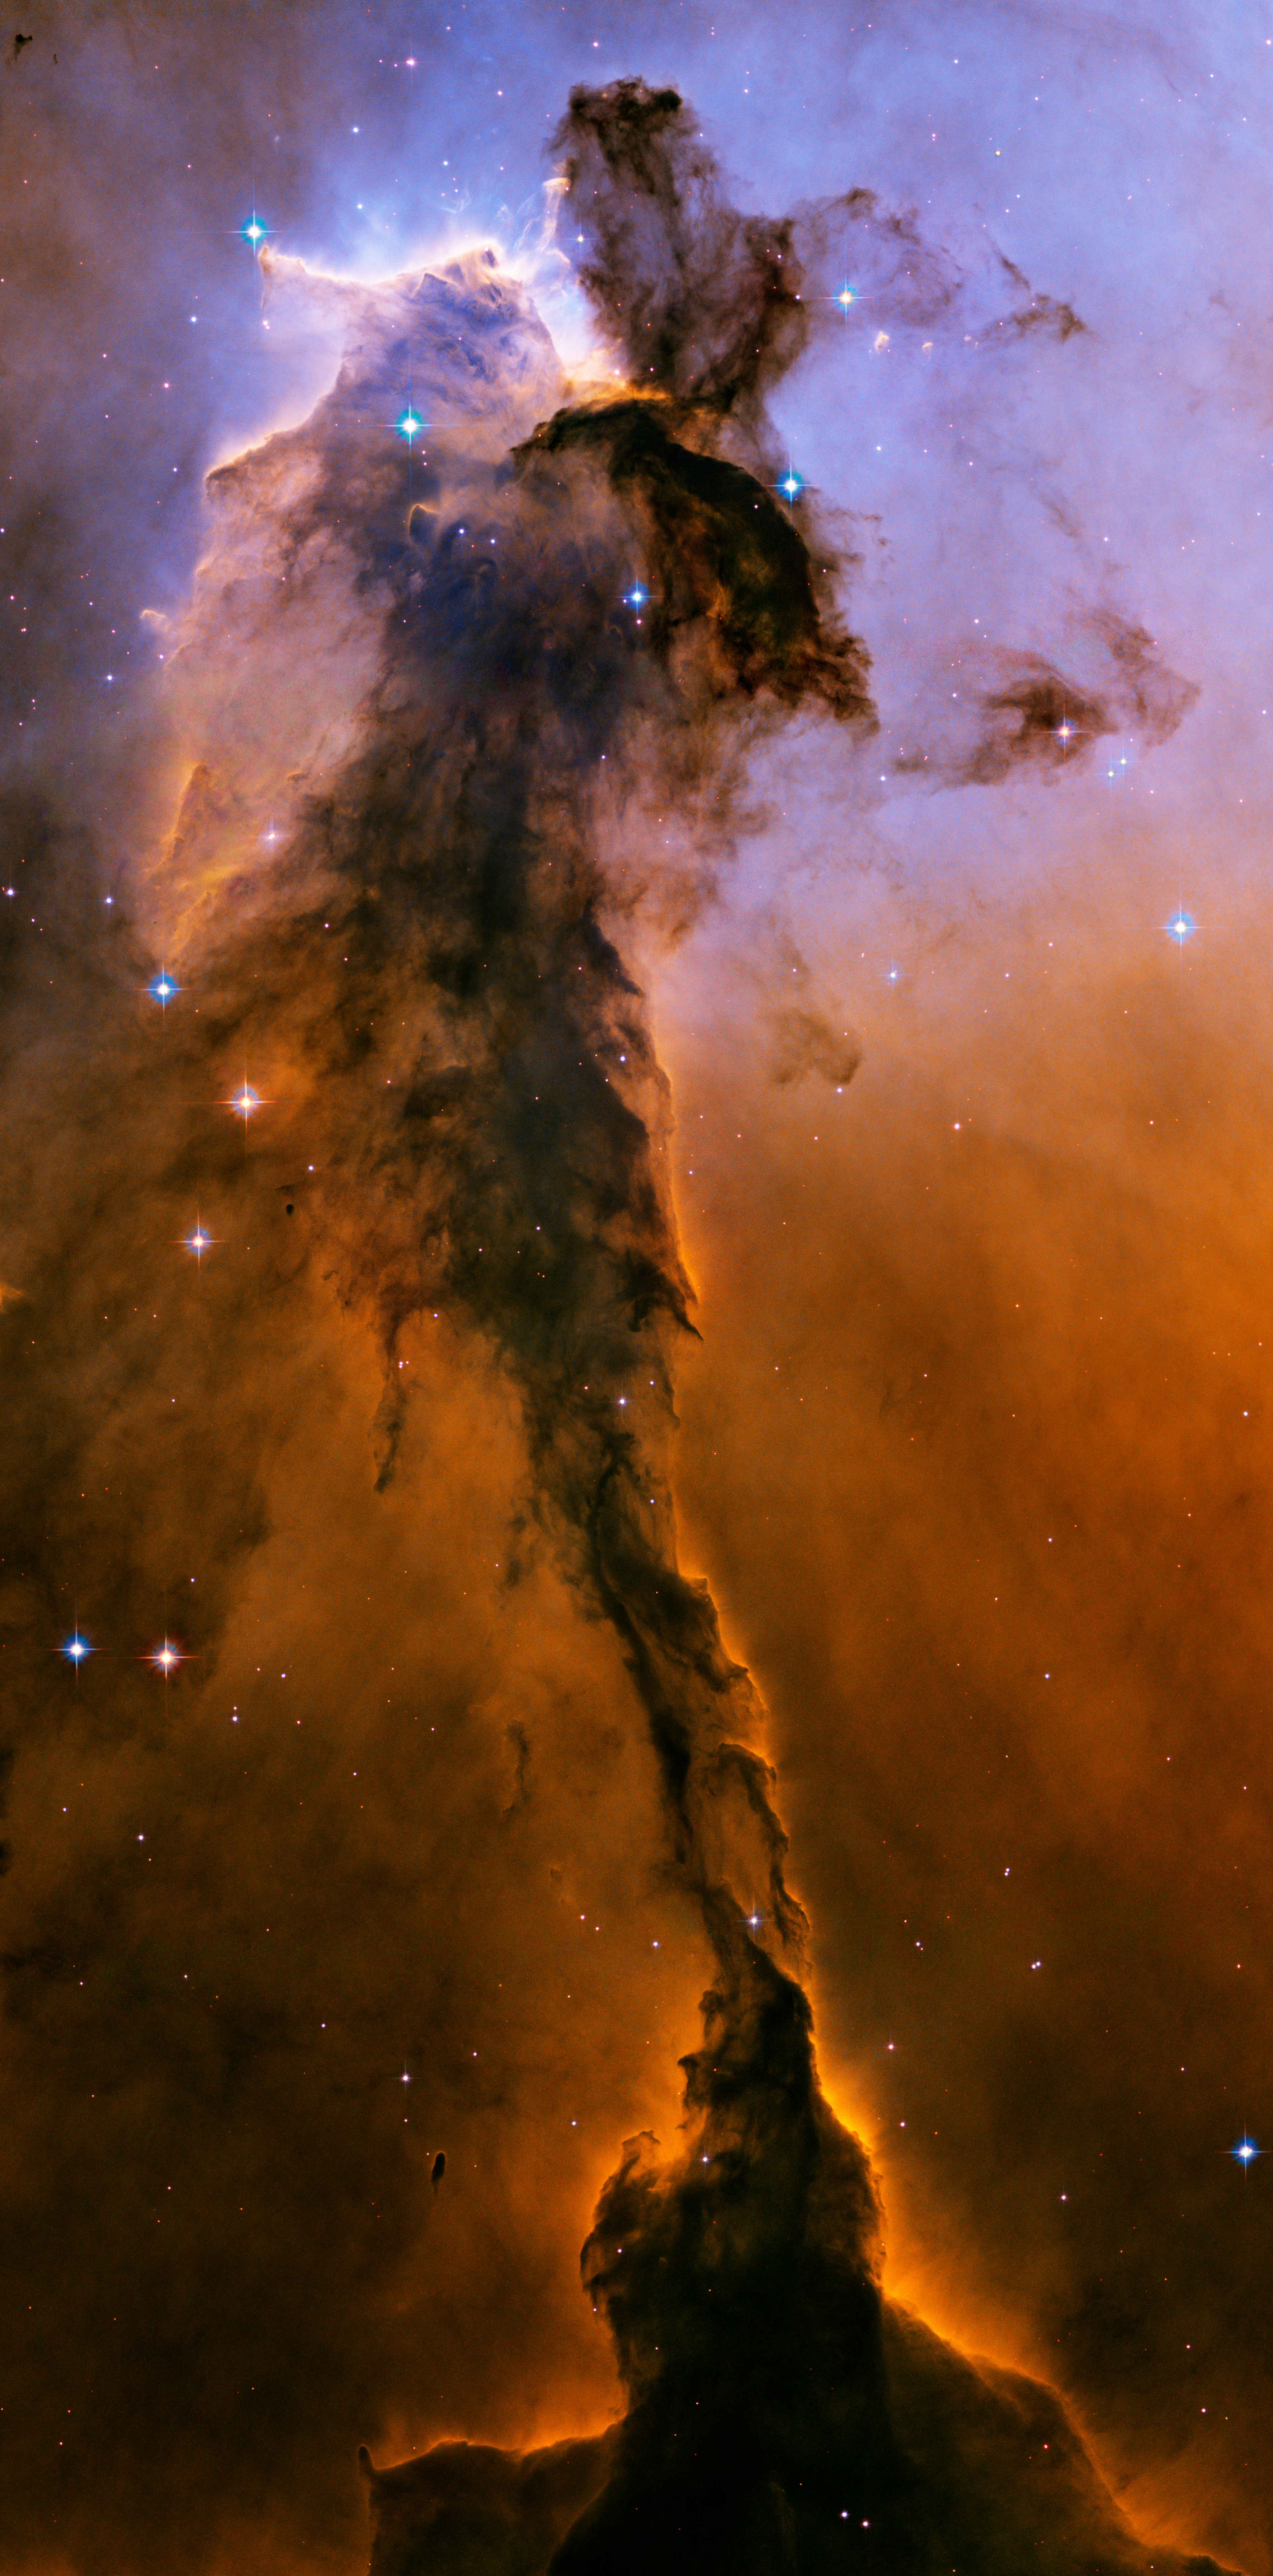

The Eagle has risen: stellar spire in the Eagle Nebula

Appearing like a winged fairy-tale creature poised on a pedestal, this object is actually a billowing tower of cold gas and dust rising from a stellar nursery called the Eagle Nebula. The soaring tower is 9.5 light-years or about 90 trillion kilometres high, about twice the distance from our Sun to the next nearest star.

Stars in the Eagle Nebula are born in clouds of cold hydrogen gas that reside in chaotic neighbourhoods, where energy from young stars sculpts fantasy-like landscapes in the gas. The tower may be a giant incubator for those newborn stars. A torrent of ultraviolet light from a band of massive, hot, young stars [off the top of the image] is eroding the pillar.

The starlight also is responsible for illuminating the tower's rough surface. Ghostly streamers of gas can be seen boiling off this surface, creating the haze around the structure and highlighting its three-dimensional shape. The column is silhouetted against the background glow of more distant gas.

The edge of the dark hydrogen cloud at the top of the tower is resisting erosion, in a manner similar to that of brush among a field of prairie grass that is being swept up by fire. The fire quickly burns the grass but slows down when it encounters the dense brush. In this celestial case, thick clouds of hydrogen gas and dust have survived longer than their surroundings in the face of a blast of ultraviolet light from the hot, young stars.

Inside the gaseous tower, stars may be forming. Some of those stars may have been created by dense gas collapsing under gravity. Other stars may be forming due to pressure from gas that has been heated by the neighbouring hot stars.

The first wave of stars may have started forming before the massive star cluster began venting its scorching light. The star birth may have begun when denser regions of cold gas within the tower started collapsing under their own weight to make stars.

The bumps and fingers of material in the centre of the tower are examples of these stellar birthing areas. These regions may look small but they are roughly the size of our solar system. The fledgling stars continued to grow as they fed off the surrounding gas cloud. They abruptly stopped growing when light from the star cluster uncovered their gaseous cradles, separating them from their gas supply.

Ironically, the young cluster's intense starlight may be inducing star formation in some regions of the tower. Examples can be seen in the large, glowing clumps and finger-shaped protrusions at the top of the structure. The stars may be heating the gas at the top of the tower and creating a shock front, as seen by the bright rim of material tracing the edge of the nebula at top, left. As the heated gas expands, it acts like a battering ram, pushing against the darker cold gas. The intense pressure compresses the gas, making it easier for stars to form. This scenario may continue as the shock front moves slowly down the tower.

The dominant colours in the image were produced by gas energized by the star cluster's powerful ultraviolet light. The blue colour at the top is from glowing oxygen. The red colon in the lower region is from glowing hydrogen. The Eagle Nebula image was taken in November 2004 with the Advanced Camera for Surveys aboard the NASA/ESA Hubble Space Telescope.

Credit: NASA, ESA, and The Hubble Heritage Team (STScI/AURA)